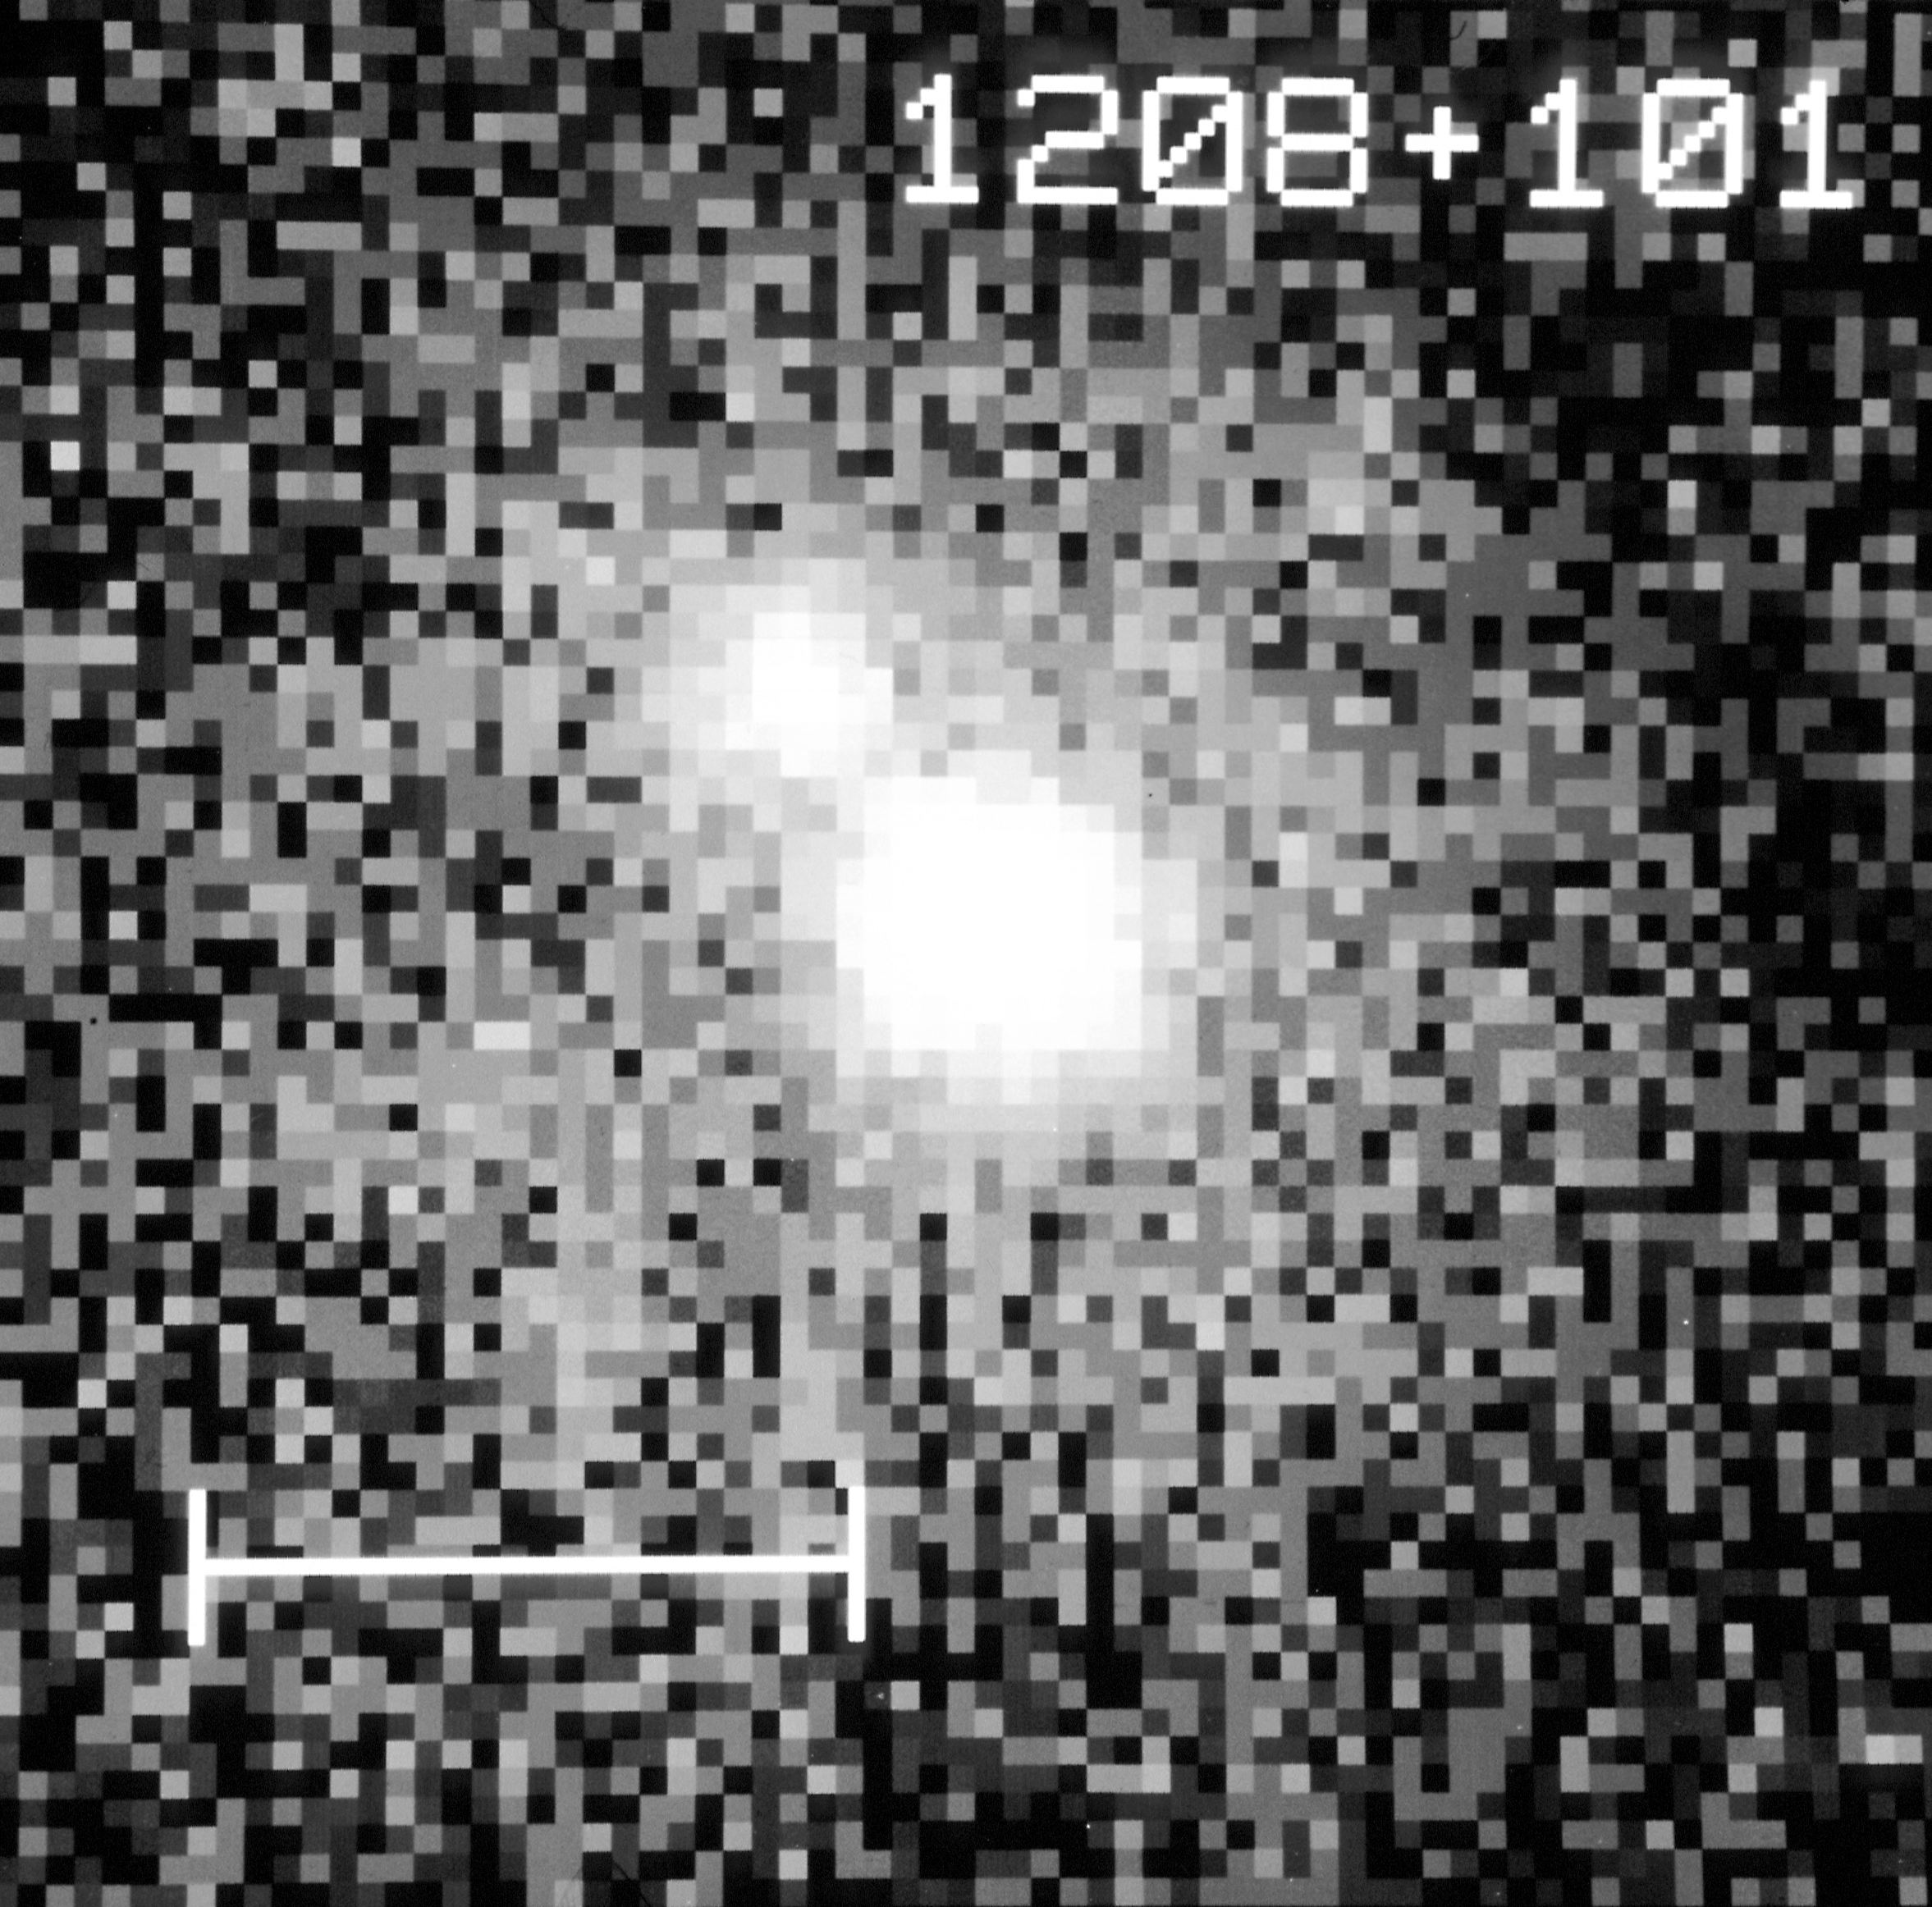

Quasar 1208+101 (gravitational lens candidate)

An image of the gravitational lens candidate taken with NASA/ESA Hubble Space Telescope's Wide Field and Planetary Camera (WFPC) in PC mode, on 23 December 1991. The HST picture shows that the quasar actually consists of two images. HST observations to be made this winter will show whether this is a gravitational lens or a chance superposition of a star in our own galaxy and a quasar. The bar in the lower left represents one arc second (the diameter of a penny seen at about two miles or 3.2 kilometres) which is the typical resolution of ground-based telescopes.

This image is being presented on Monday, January 13th at the 179th meeting of the American Astronomical Society in Atlanta, Georgia.

Credit: John Bachall (IAS Princeton), Dan Maoz (IAS, Princeton), Donald Schneider (IAS, Princeton) Brian Yanny (IAS, Princeton), Rodger Doxsey (STScI) Neta Bahcall (Princeton), Qfer Lahav (Cambridge, England).